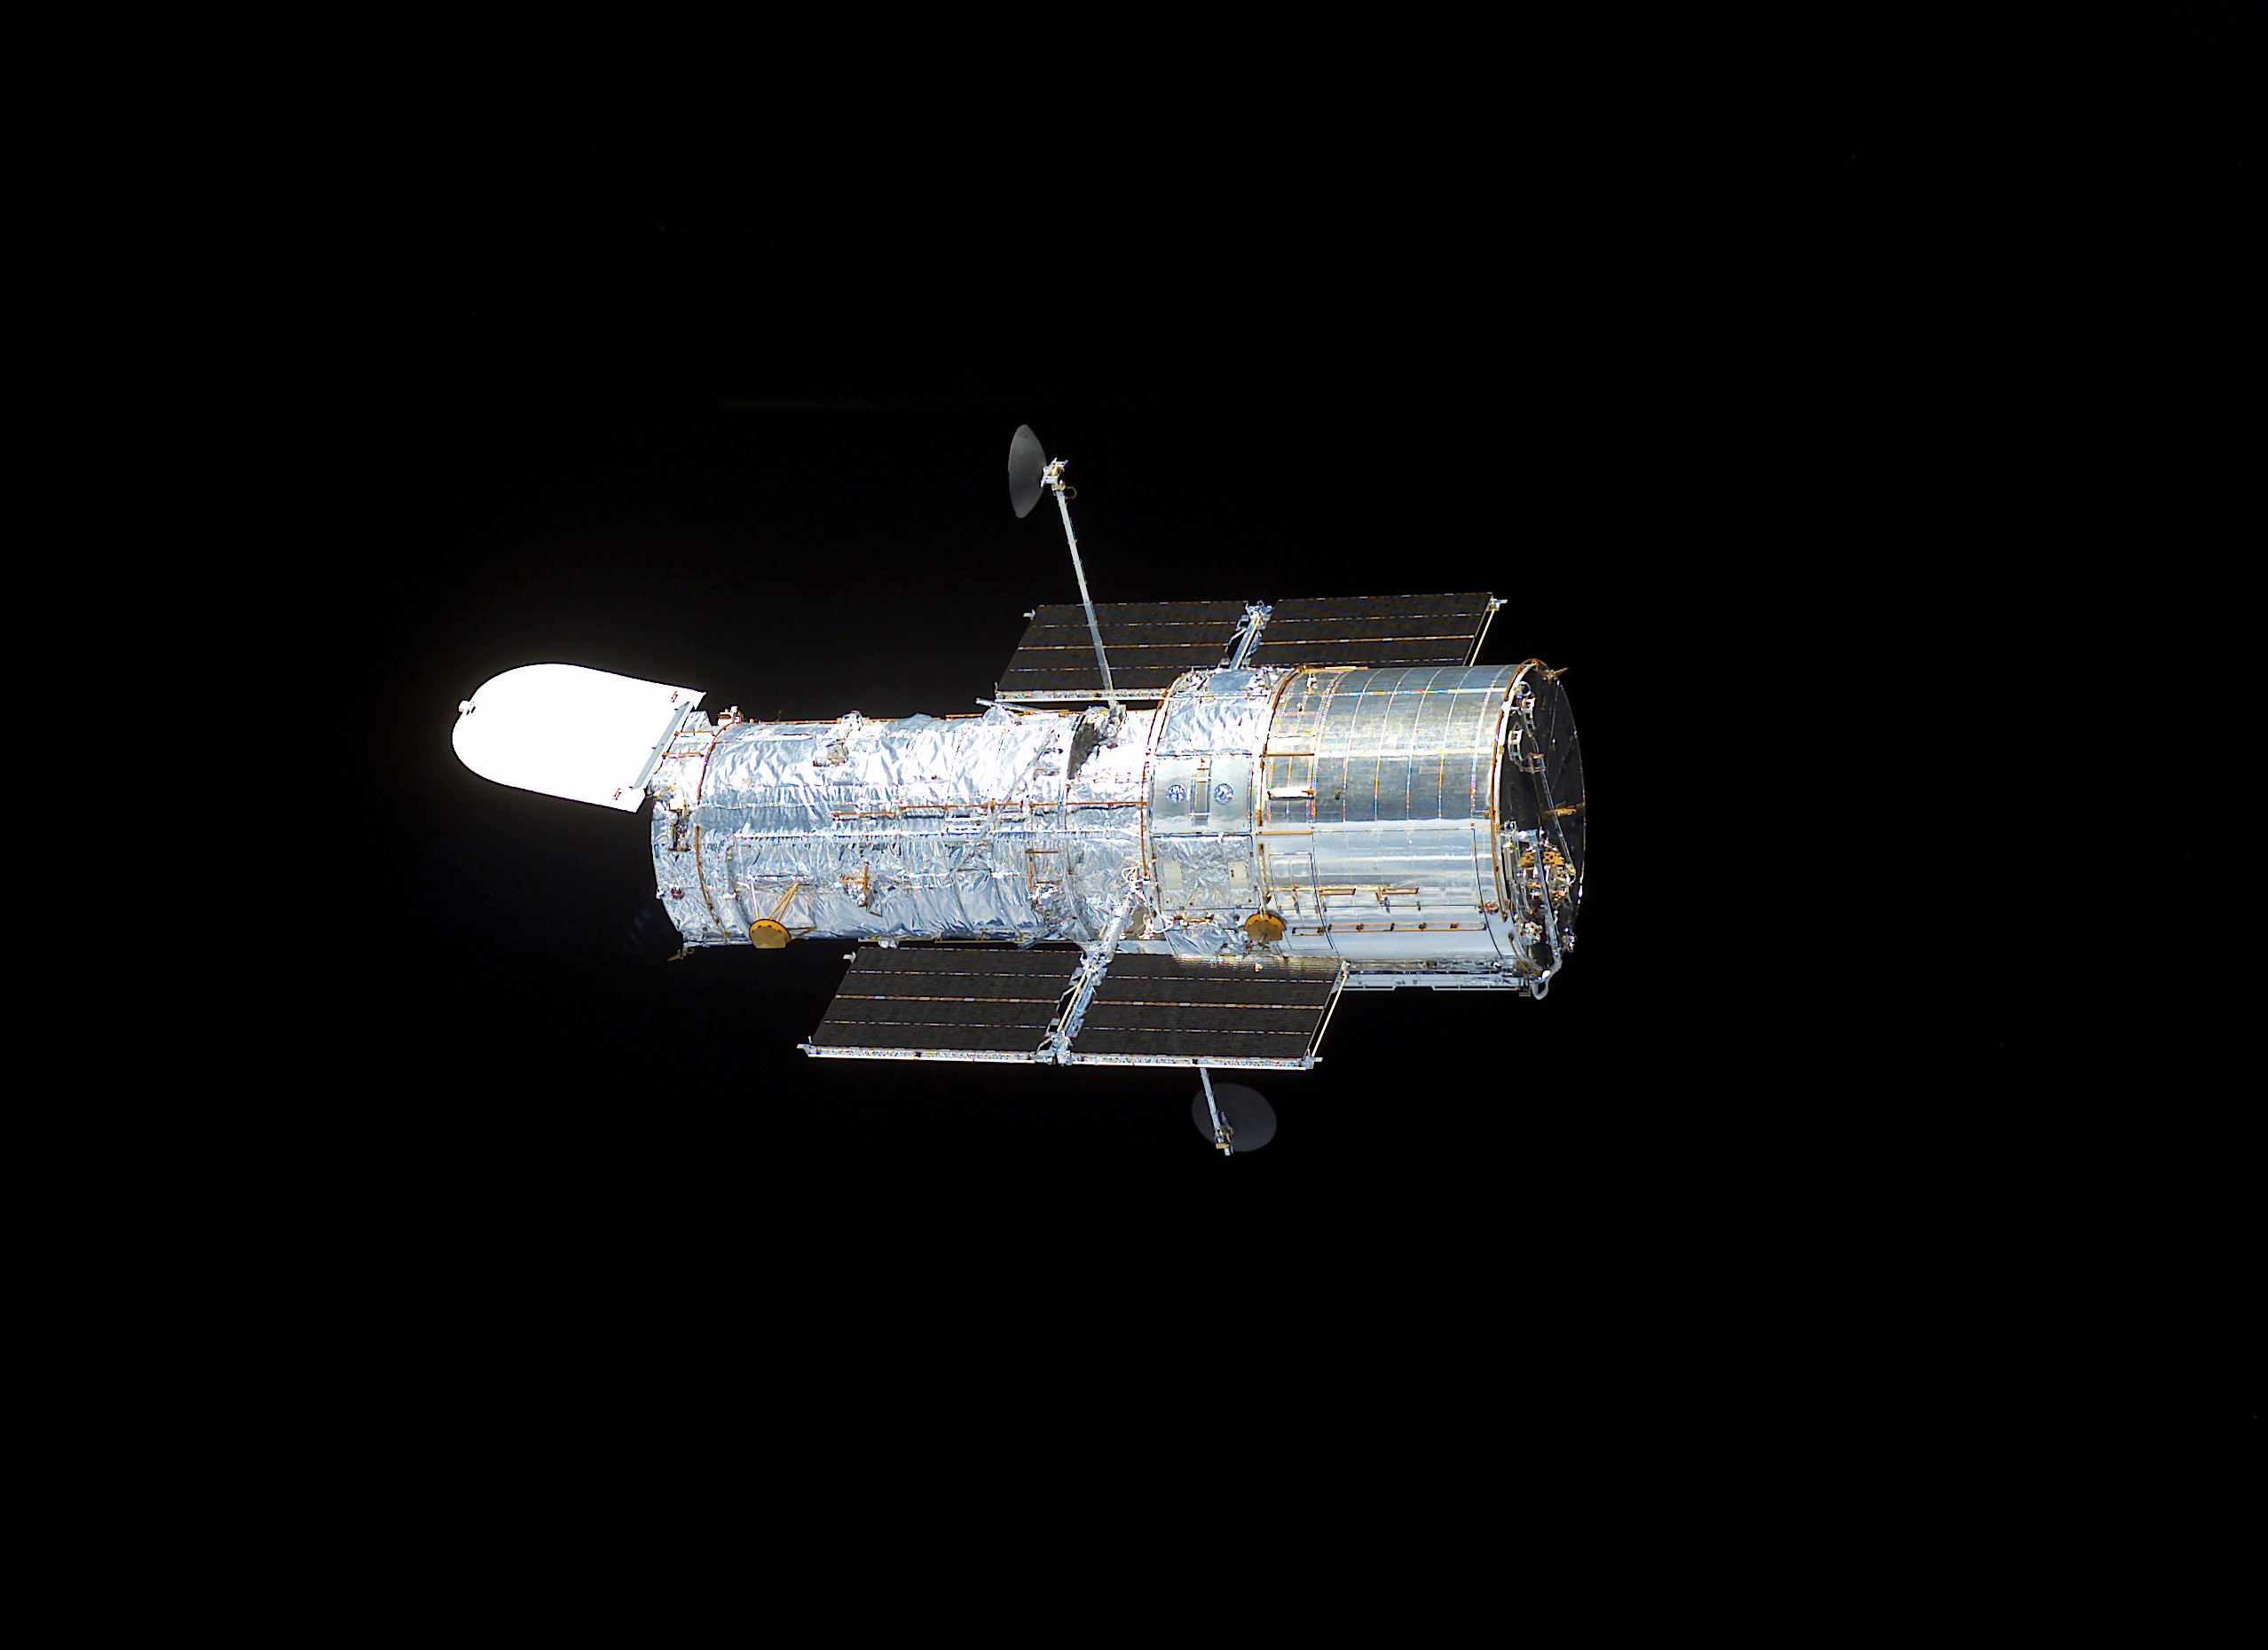

Hubble Space Telescope sporting new solar arrays during SM3B

STS109-E-5700 (9 March 2002) --- The Hubble Space Telescope, sporting new solar arrays and other important but less visible new hardware, begins its separation from the Space Shuttle Columbia. The STS-109 crew deployed the giant telescope at 4:04 a.m. CST (1004 GMT), March 9, 2002. Afterward, the seven crew members began to focus their attention to the trip home, scheduled for March 12. The STS-109 astronauts conducted five space walks to service and upgrade Hubble. This image was recorded with a digital still camera.

Credit: NASA/ESA